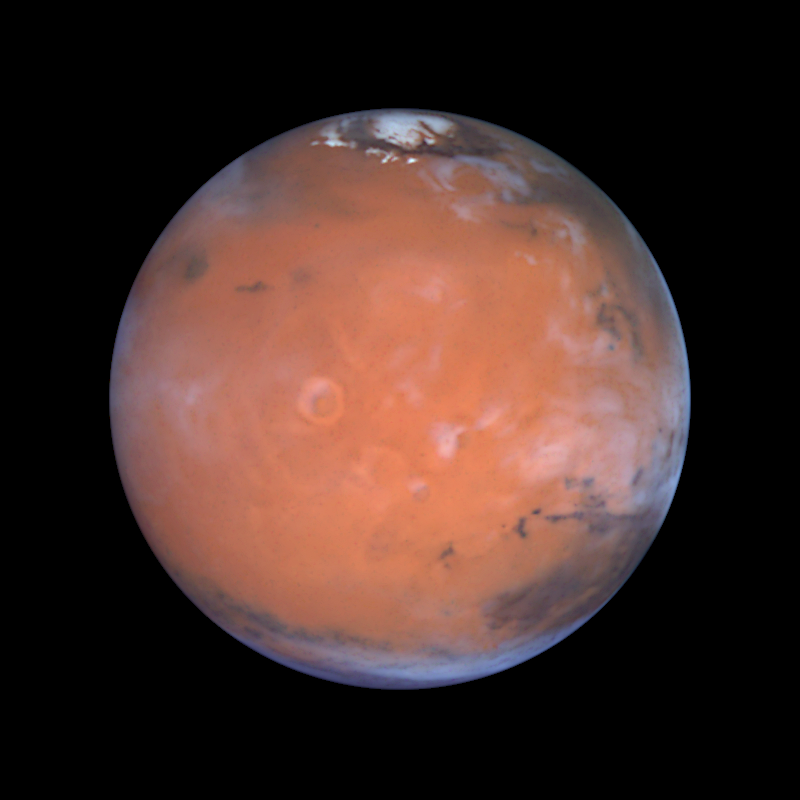

Mars at Opposition (the Tharsis Region)

This image is centered on the region of the planet known as Tharsis, home of the largest volcanoes in the solar system. The bright, ring-like feature just to the left of center is the volcano Olympus Mons, which is more than 340 miles (550 kilometers) across and 17 miles (27 kilometers) high. Thick deposits of fine-grained, windblown dust cover most of this hemisphere. The colours indicate that the dust is heavily oxidized ('rusted'), and millions (or perhaps billions) of years of dust storms have homogenized its composition. Prominent late afternoon clouds along the right limb of the planet can be seen.

Credit: Steve Lee (University of Colorado), Jim Bell (Cornell University), Mike Wolff (Space Science Institute), and NASA/ESA